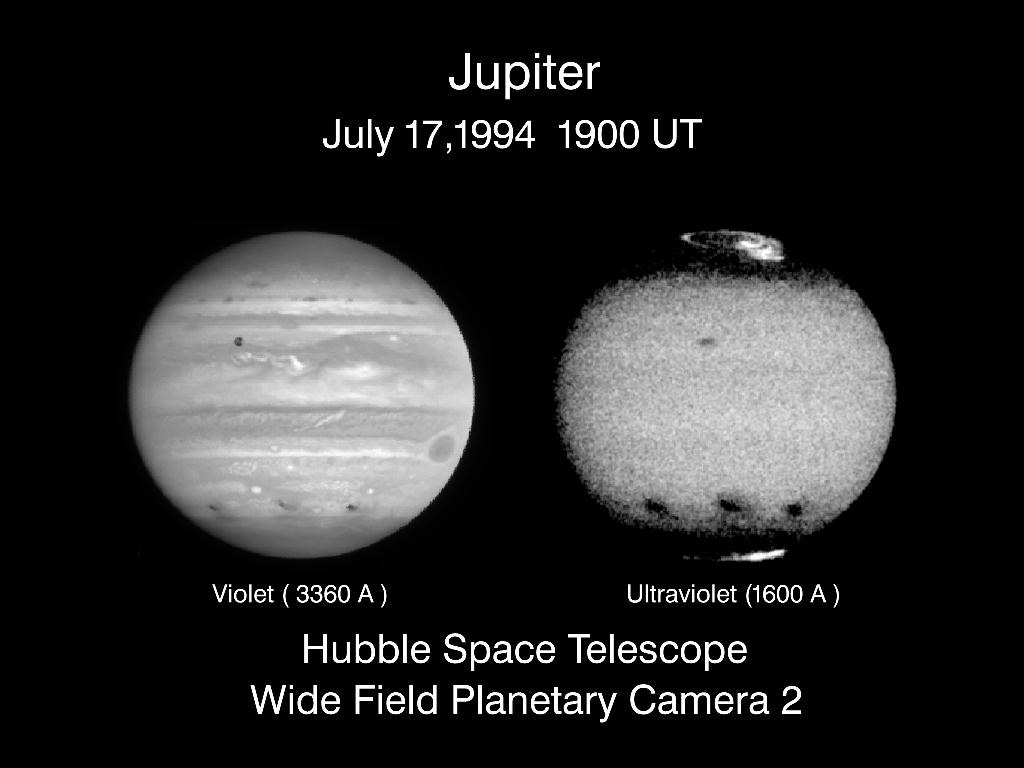

Jupiter's comet collision sites as seen in visible and ultraviolet light

This comparison of visible light (blue) and far-ultraviolet (FUV) images of Jupiter taken with the Wide Field Planetary Camera-2 (WFPC-2) on NASA/ESA Hubble Space Telescope show how the appearance of the planet and of comet Shoemaker-Levy-9 impact sites differ at these two wavelengths (1400-2100 and 3100-3600 Angstroms). The images taken 20 minutes apart on July 17,1994 (around 19:00 UT), show the impact sites on the south hemisphere, from left to right, of comet fragments C, A and E, about 12, 23, and 4 hours after each collision. Jupiter's satellite 10 is seen crossing above the center of the disk, and the famous Great Red Spot is near the eastern limb.

Credit: Hubble Space Telescope Jupiter Imaging Team